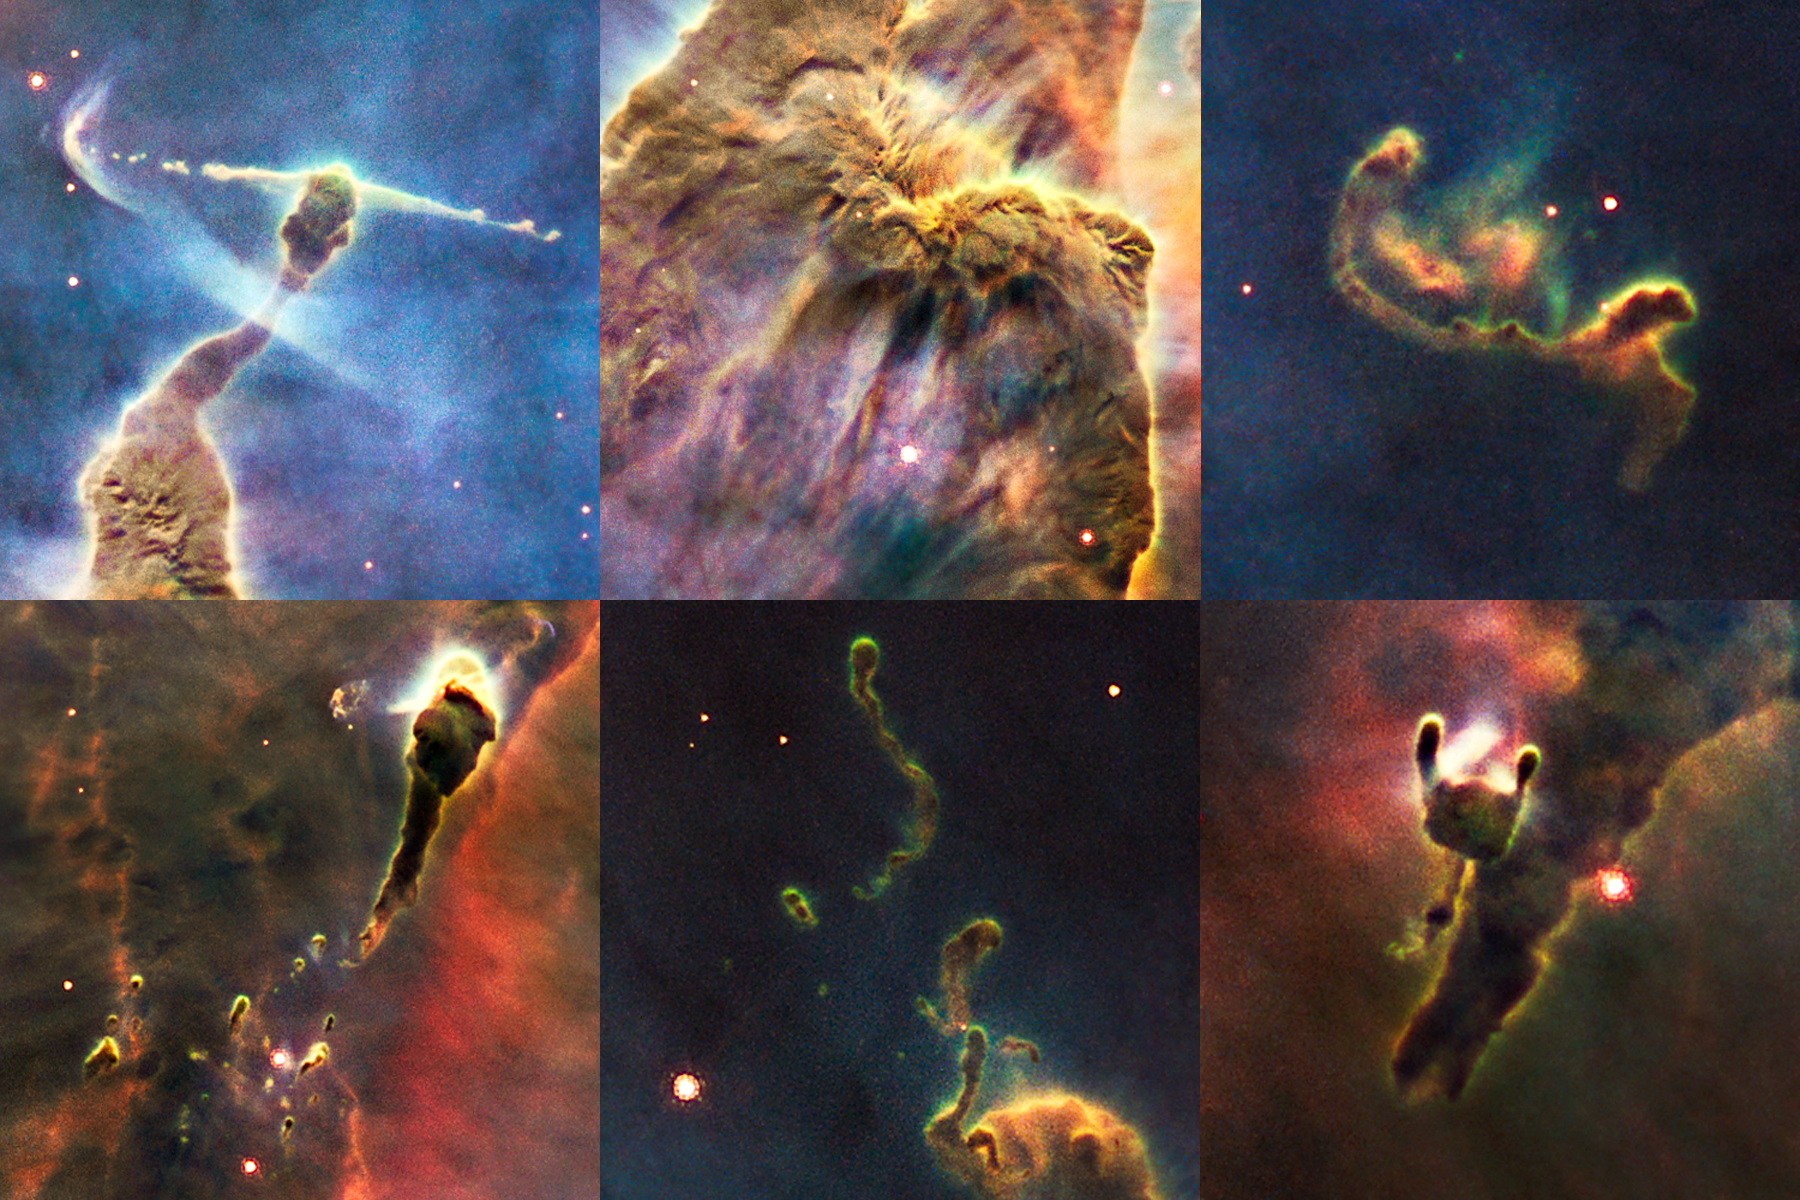

Details in a cosmic pinnacle

This is a series of close-up views of the complex gas structures in a small portion of the Carina Nebula. The nebula is a cold cloud of predominantly hydrogen gas. It is laced with dust, which makes the cloud opaque. The cloud is being eroded by a gusher of ultraviolet light from young stars in the region. They sculpt a variety of fantasy shapes, many forming tadpole-like structures. In some frames, smaller pieces of nebulosity can be seen freely drifting, such as the structure, four trillion kilometres long, at upper right. The most striking feature is a horizontal jet 5.5 trillion kilometres long in the upper left frame. It is being blasted into space by a young star hidden in the tip of the pillar-like structure. A bowshock has formed near the tip of the jet.

Credit: NASA, ESA, M. Livio and the Hubble 20th Anniversary Team (STScI)